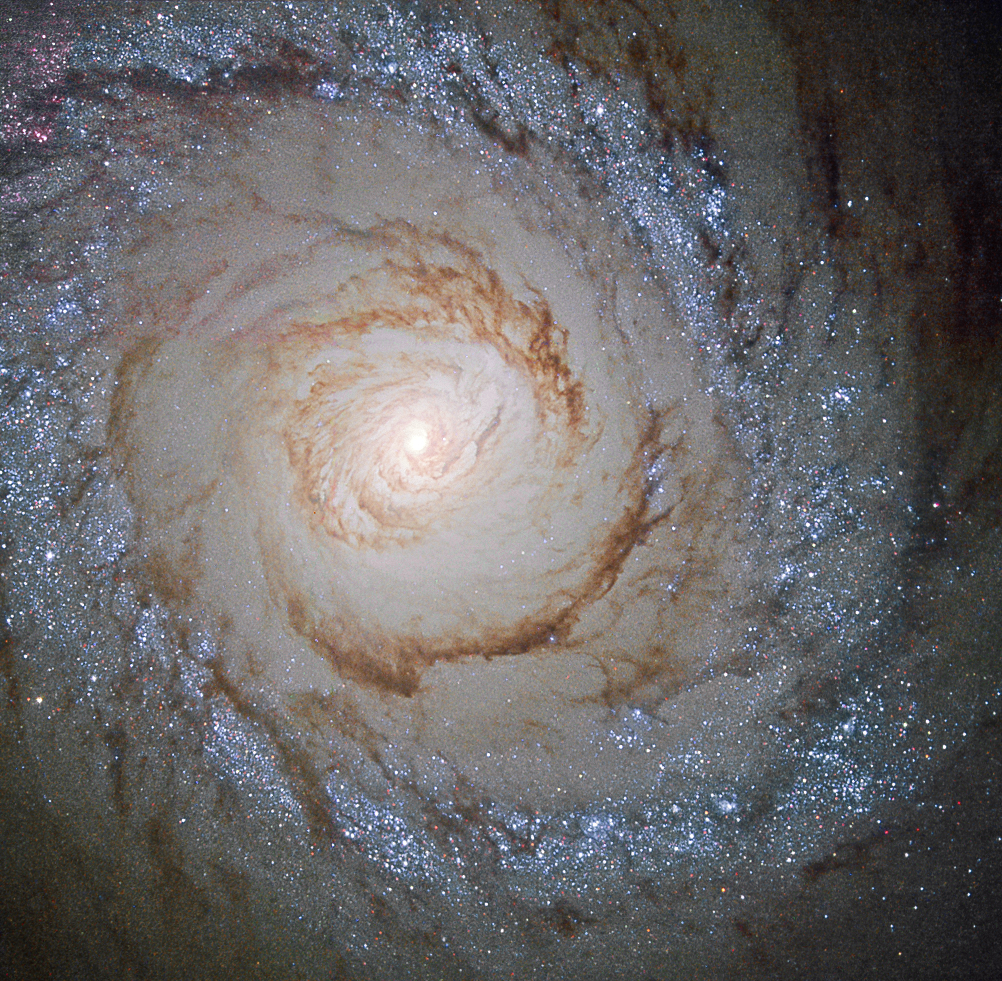

Starburst galaxy Messier 94

This image shows the galaxy Messier 94, which lies in the small northern constellation of the Hunting Dogs, about 16 million light-years away.

Within the bright ring around Messier 94 new stars are forming at a high rate and many young, bright stars are present within it – thanks to this, this feature is called a starburst ring.

The cause of this peculiarly shaped star-forming region is likely a pressure wave going outwards from the galactic centre, compressing the gas and dust in the outer region. The compression of material means the gas starts to collapse into denser clouds. Inside these dense clouds, gravity pulls the gas and dust together until temperature and pressure are high enough for stars to be born.

Credit: ESA/Hubble & NASA